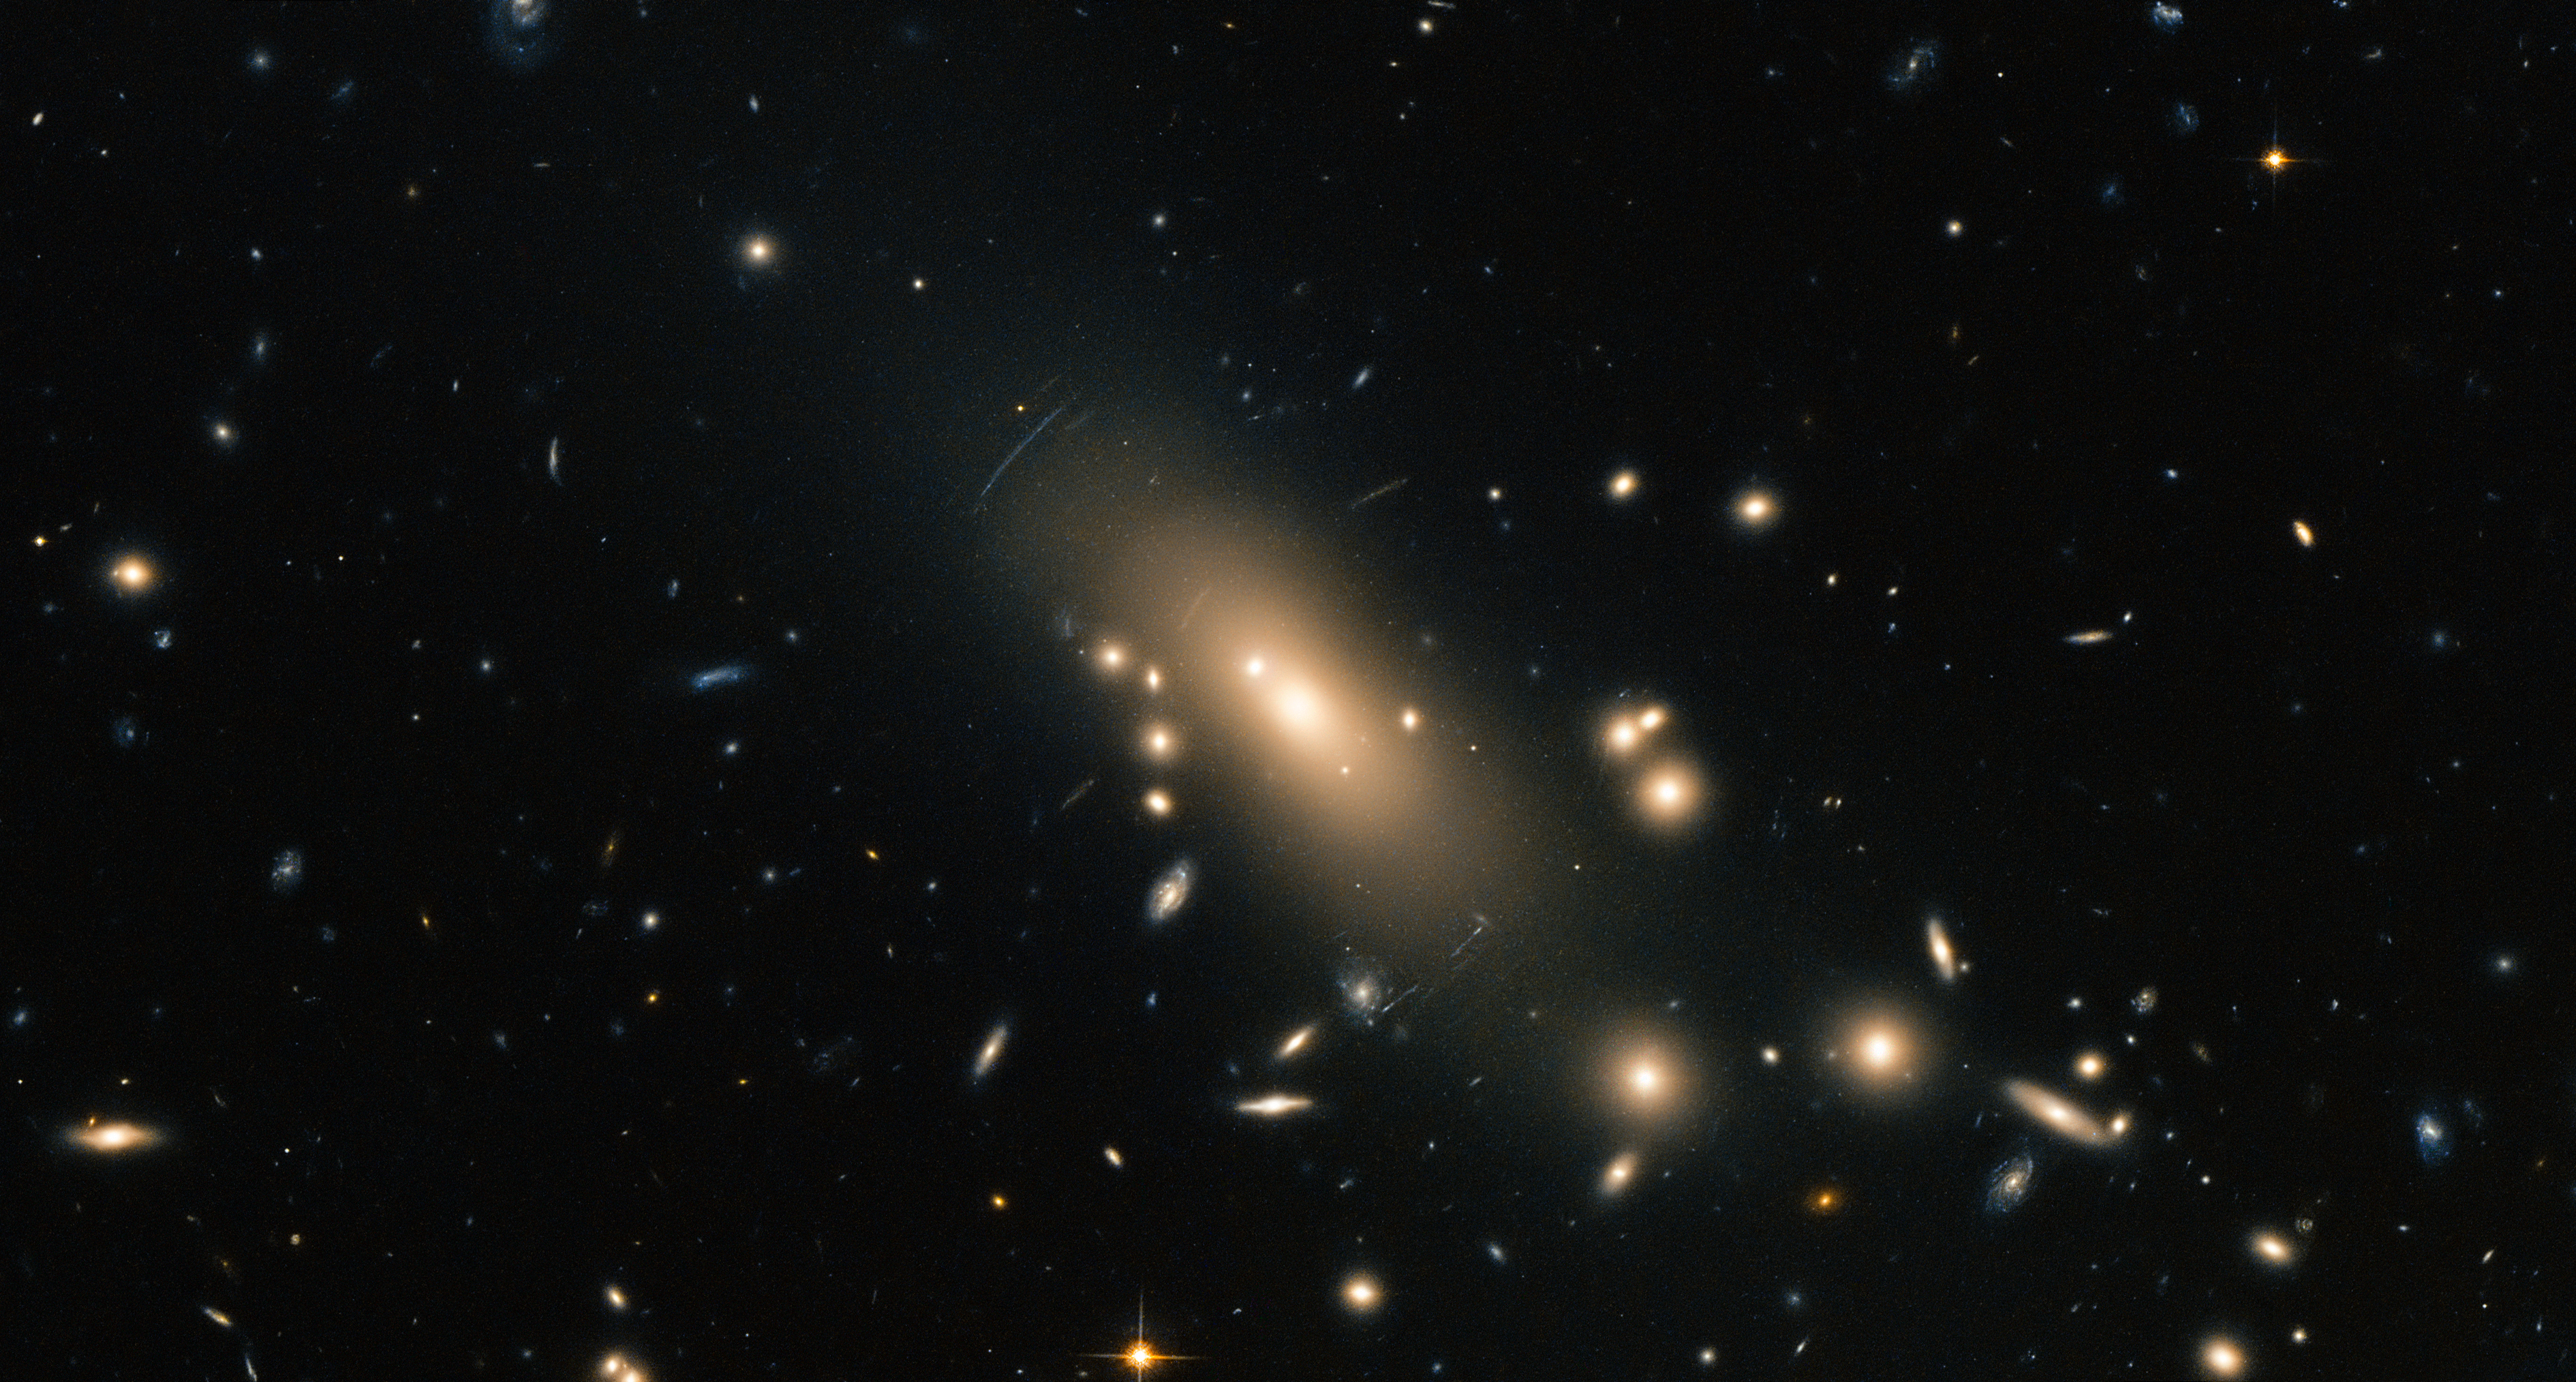

Hubble reveals a super-rich galactic neighbourhood

This new image from the NASA/ESA Hubble Space Telescope shows the super-rich galaxy cluster Abell 1413. Located between the constellations of Leo (The Lion) and Coma Berenices, the cluster is over 2 billion light-years from Earth. This image is dominated by a large and highly elliptical galaxy called MCG+04-28-097, with a halo of stars extending for more than 6.5 million light-years [1].

Abell 1413 is part of the Abell catalogue, a collection of over 4000 rich clusters of galaxies fairly close to Earth — at least from a cosmological perspective — their light took less than 3 billion years to reach us. The clusters are called rich due to the huge number of galaxies they play host to. Abell 1413 is observed to contain more than 300 galaxies held together by the immense gravity of the cluster.

The strong interactions between these galaxies cause the material in the cluster to be heated to extremely high temperatures of almost 100 million degrees. Because of this, the cluster emits very strong X-ray radiation.

Visible distortions in the image can be seen in the form of arcs, caused by gravitational lensing [2].

This image was created from optical and near-infrared exposures taken with the Wide Field Channel of Hubble’s Advanced Camera for Surveys (ACS). A version of this image was entered into the Hubble's Hidden Treasures image processing competition by contestant Nick Rose.

Credit: ESA/Hubble & NASA Acknowledgement: Nick Rose